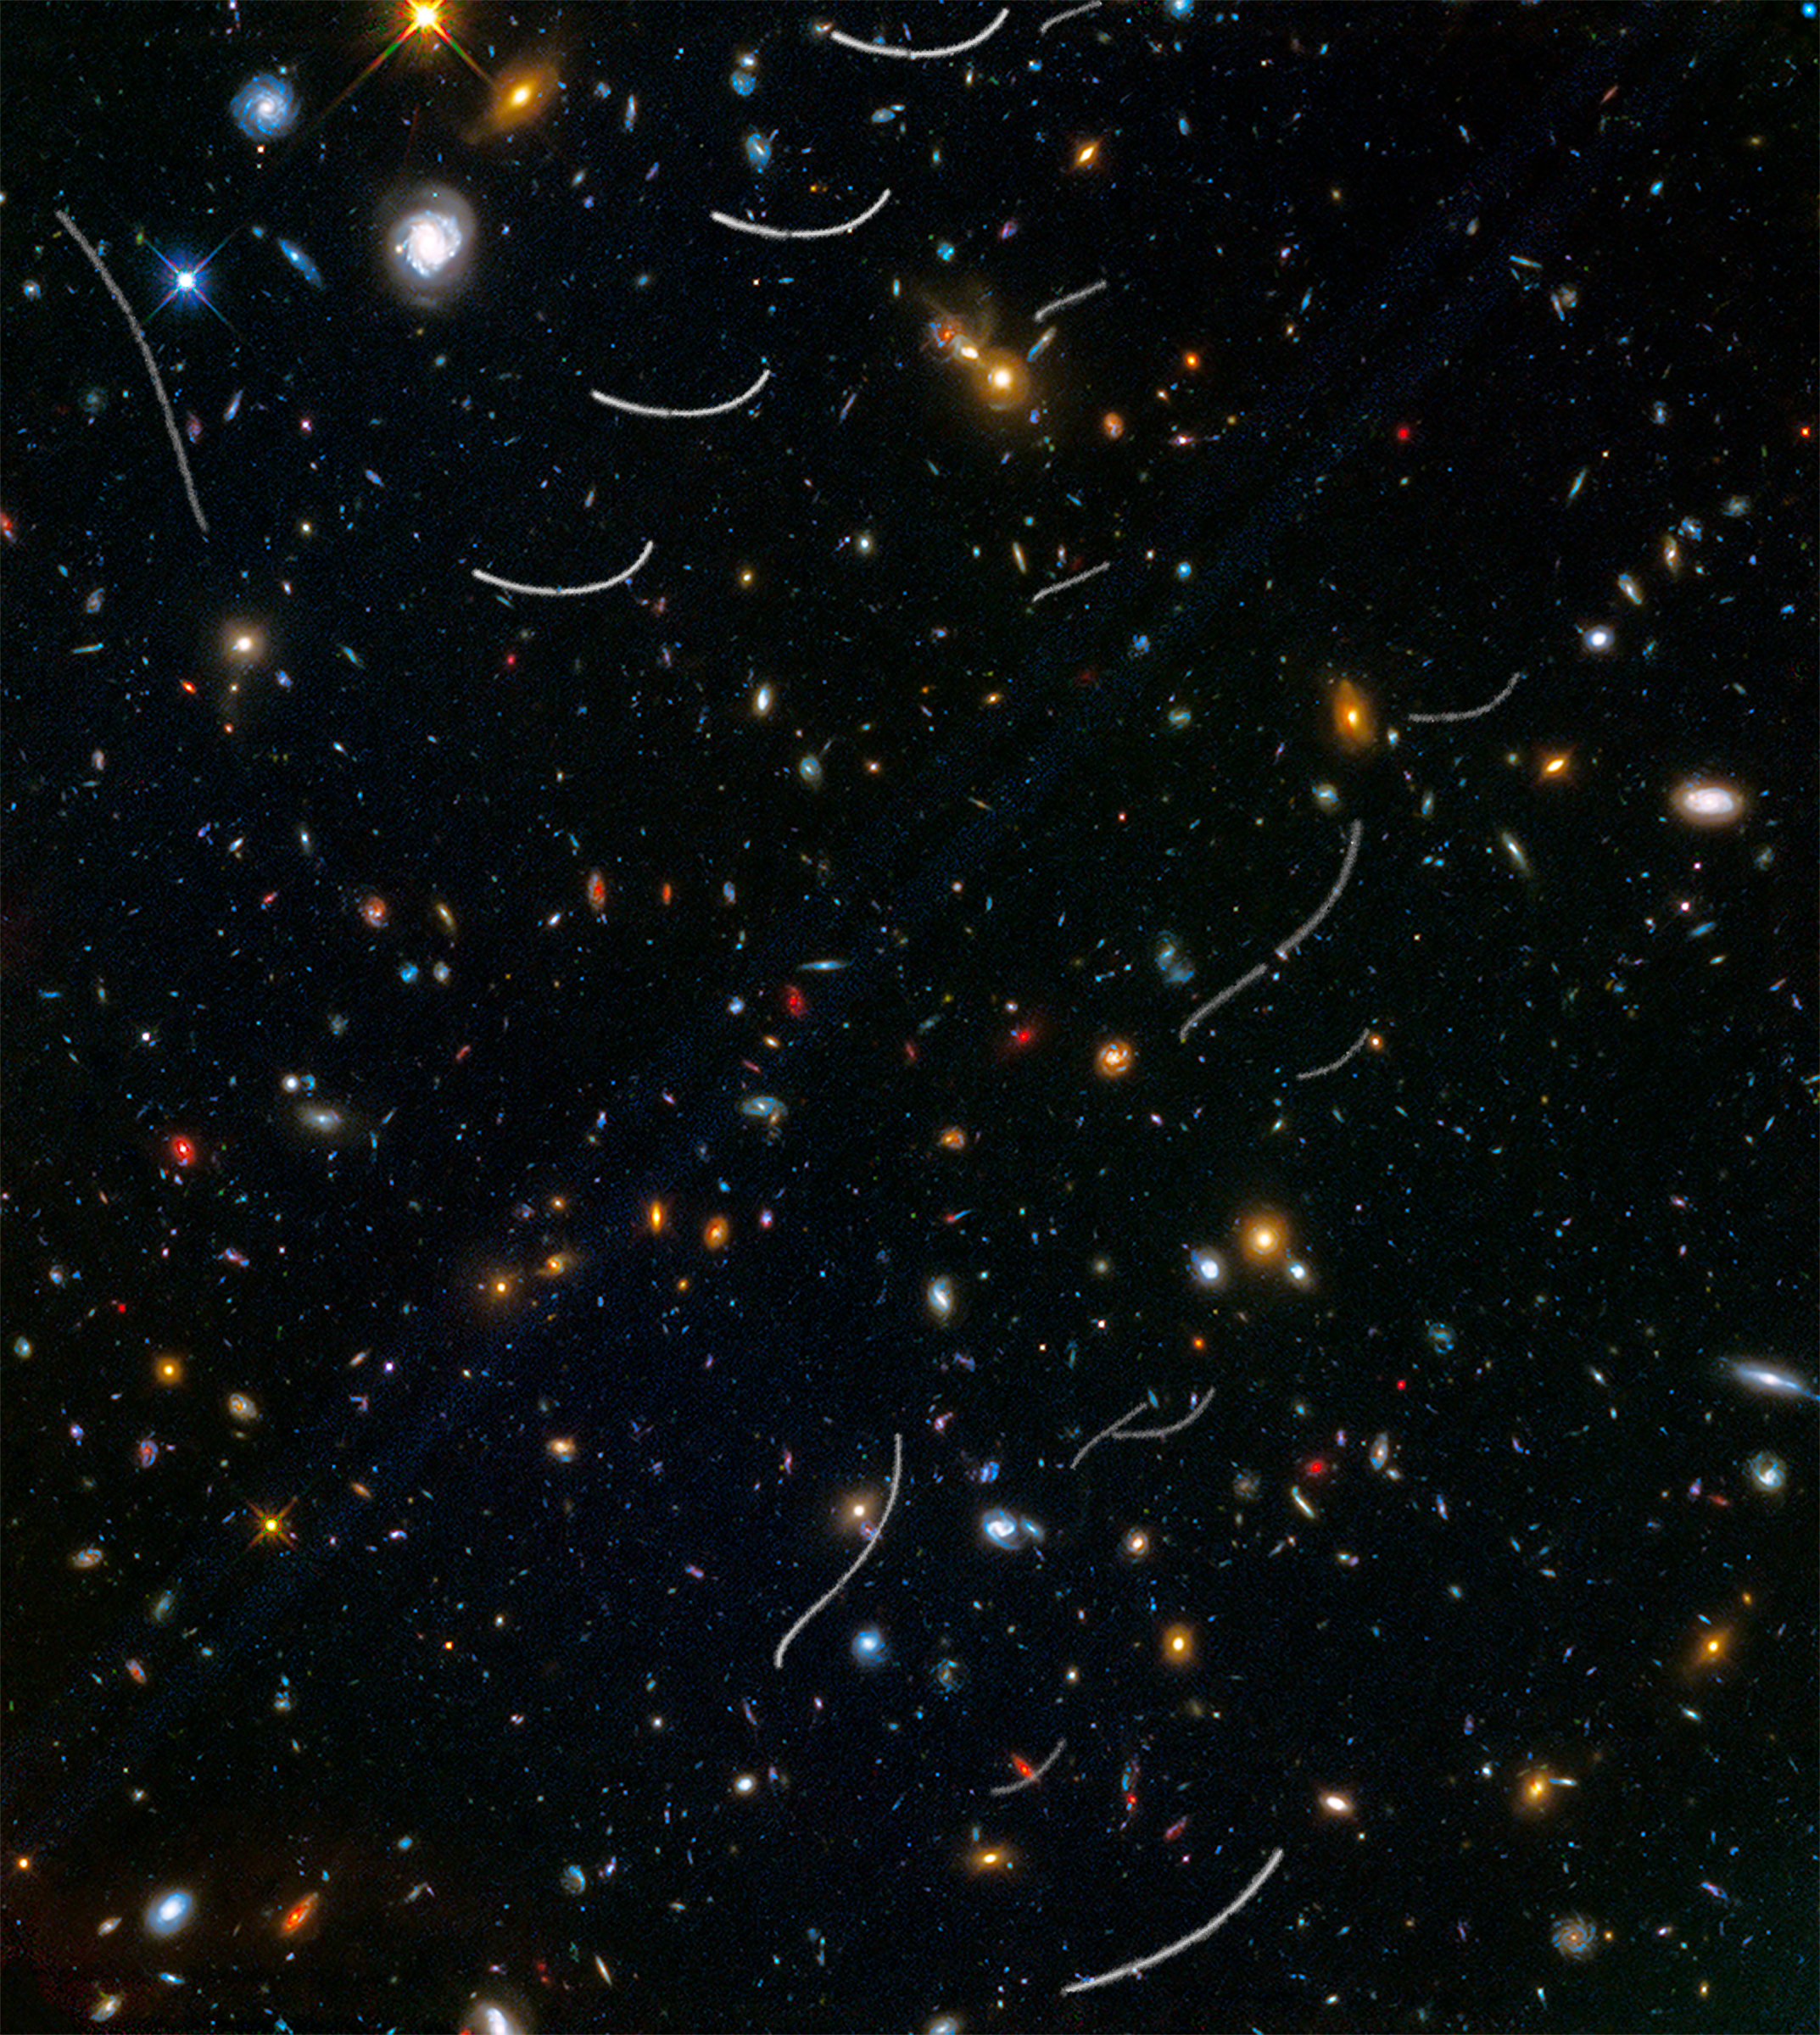

Abell 370 Parallel Field with Asteroids

Some asteroids from within our Solar System have photobombed deep images of the Universe taken by the NASA/ESA Hubble Space Telescope. These asteroids reside, on average, only about 260 million kilometres from Earth — right around the corner in astronomical terms. Yet they've horned their way into this picture of thousands of galaxies scattered across space and time at inconceivably farther distances.

This Hubble photo of a random patch of sky is part of the Frontier Fields survey. The colourful image contains thousands of galaxies, including massive yellowish ellipticals and majestic blue spirals. Much smaller, fragmentary blue galaxies are sprinkled throughout the field. The reddest objects are most likely the farthest galaxies, whose light has been stretched into the red part of the spectrum by the expansion of space.

Intruding across the picture are asteroid trails that appear as curved or S-shaped streaks. Rather than leaving one long trail, the asteroids appear in multiple Hubble exposures that have been combined into one image. Of the 20 total asteroid sightings for this field, seven are unique objects. Of these seven asteroids, only two were earlier identified. The others were too faint to be seen previously.

The trails look curved due to an observational effect called parallax. As Hubble orbits around Earth, an asteroid will appear to move along an arc with respect to the vastly more distant background stars and galaxies. The motion of Earth around the Sun, and the motion of the asteroids along their orbits, are other contributing factors to the apparent skewing of asteroid paths.

All the asteroids were found manually, the majority by "blinking" consecutive exposures to capture apparent asteroid motion. Astronomers found a unique asteroid for every 10 to 20 hours of exposure time.

The Frontier Fields program is a collaboration among several space telescopes and ground-based observatories to study six massive galaxy clusters and their effects. Using a different camera, pointing in a slightly different direction, Hubble photographed six so-called "parallel fields" at the same time it photographed the massive galaxy clusters. This maximised Hubble's observational efficiency in doing deep space exposures. These parallel fields are similar in depth to the famous Hubble Deep Field, and include galaxies about four-billion times fainter than can be seen by the human eye.

This picture is of the parallel field for the galaxy cluster Abell 370. It was assembled from images taken in visible and infrared light. The field's position on the sky is near the ecliptic, the plane of our Solar System. This is the zone in which most asteroids reside, which is why Hubble astronomers saw so many crossings. Hubble deep-sky observations taken along a line-of-sight near the plane of our Solar System commonly record asteroid trails.

Credit: NASA, ESA, and B. Sunnquist and J. Mack (STScI) Acknowledgment: NASA, ESA, and J. Lotz (STScI) and the HFF Team